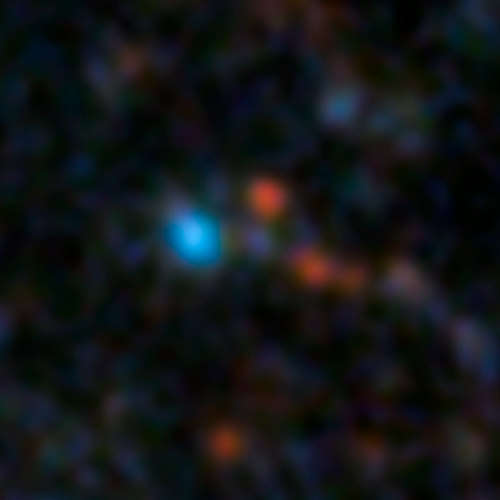

2005-2006 Hubble image of progenitor system for Supernova 2012Z

These Hubble data from 2005 and 2006 show the progenitor system for Supernova 2012Z, a supernova in the outskirts of spiral galaxy NGC1309. The system is thought to be a binary system containing a helium star transferring material to a white dwarf which eventually exploded.

The annotated image of the galaxy shows the context for this system more clearly.

Credit: NASA, ESA, C. McCully and S. Jha (Rutgers University), R. Foley (University Illinois), and Z. Levay (STScI) Acknowledgment: Hubble Heritage Team (STScI/AURA), and A. Riess (JHU/STScI)